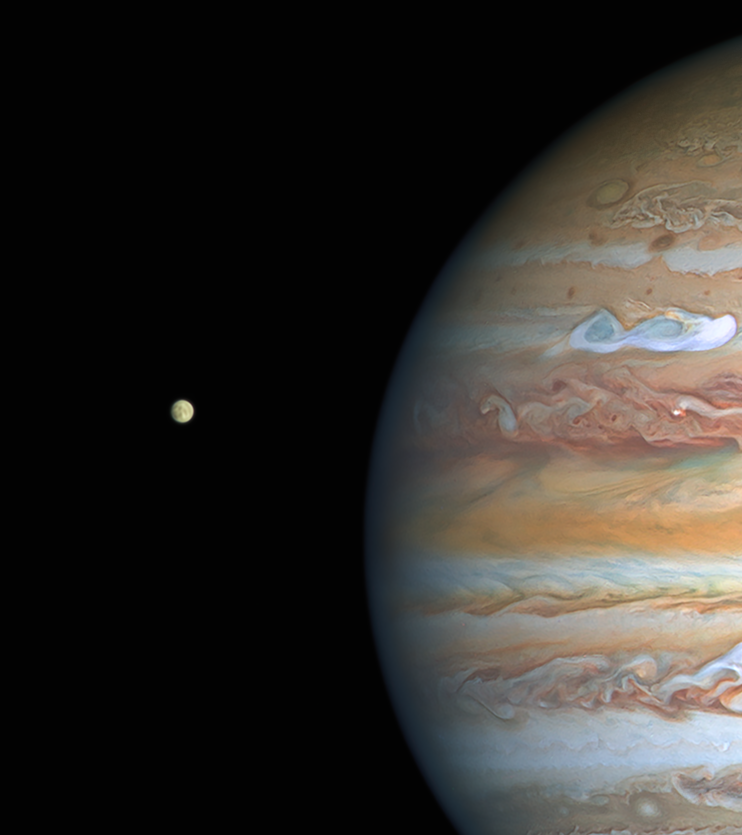

Hubble's View of Jupiter and Europa in August 2020

This image of Jupiter and Europa, taken by the NASA/ESA Hubble Space Telescope on 25 August 2020, was captured when the planet was 653 million kilometres from Earth. The full view of this Hubble image can be viewed here.

Credit: NASA, ESA, A. Simon (Goddard Space Flight Center), and M. H. Wong (University of California, Berkeley) and the OPAL team.